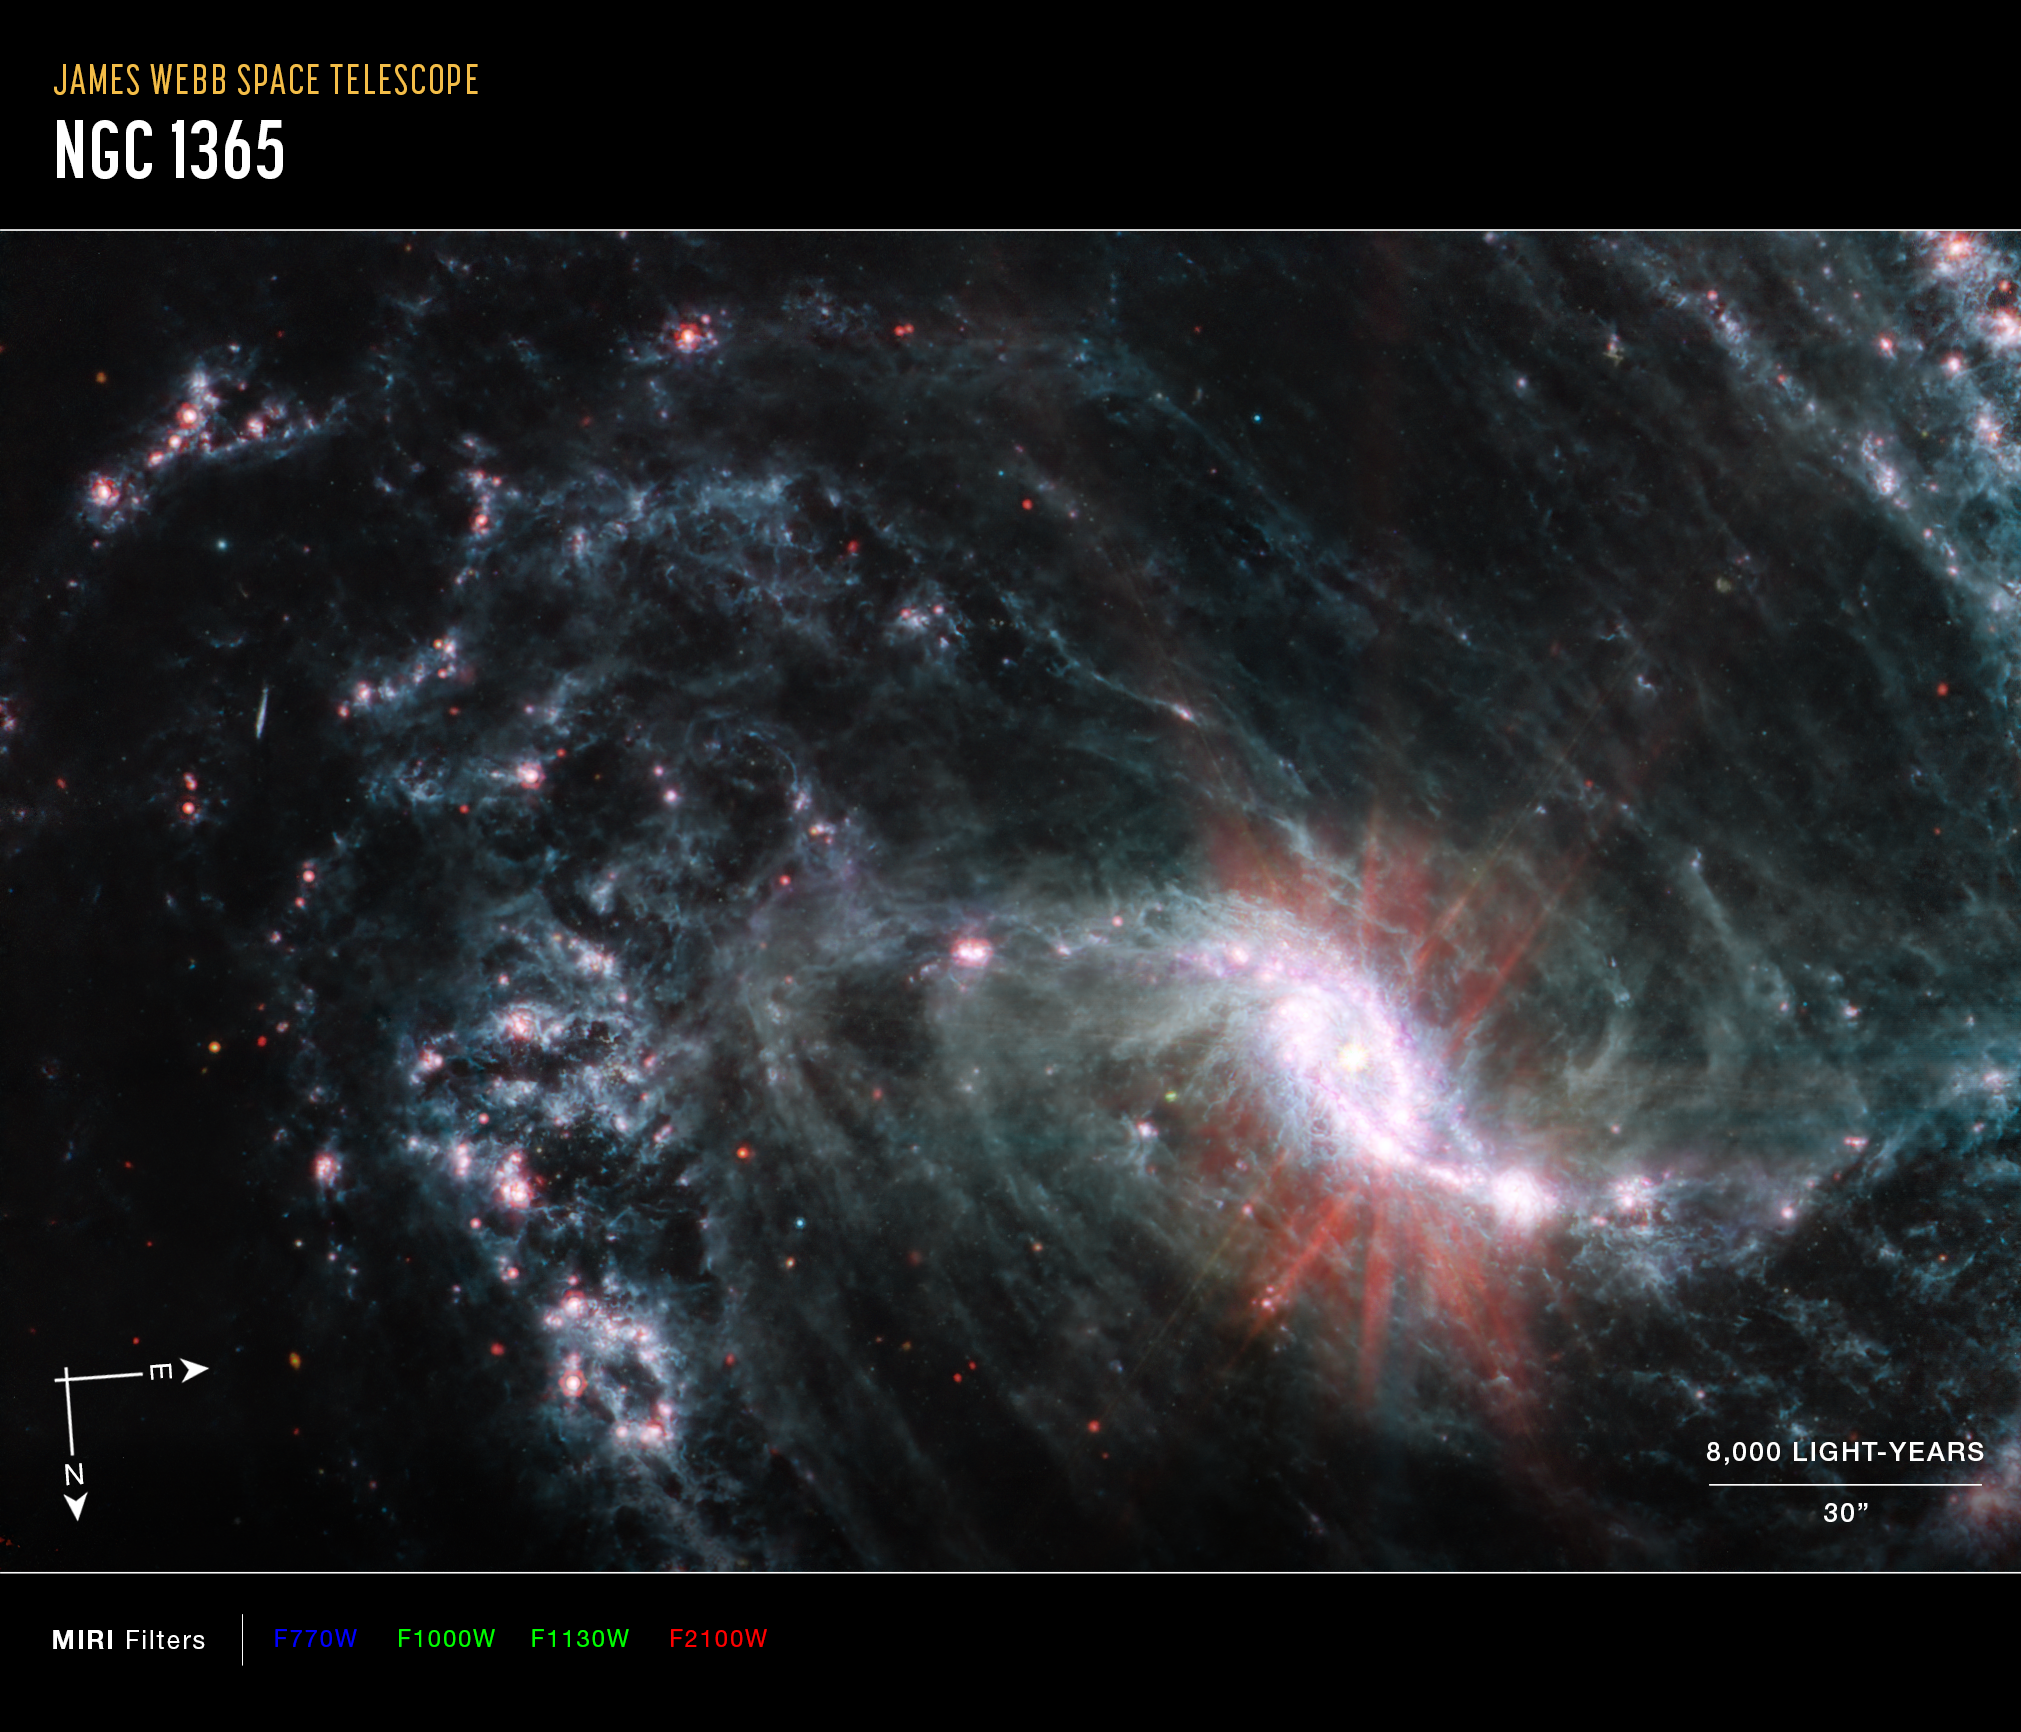

NGC 1365 (MIRI Image - Annotated)

This image of the nearby galaxy NGC 1365, captured by Webb’s Mid-Infrared Instrument (MIRI) shows compass arrows, scale bar, and color key for reference.

The north and east compass arrows show the orientation of the image on the sky. Note that the relationship between north and east on the sky (as seen from below) is flipped relative to direction arrows on a map of the ground (as seen from above). At the lower right is a scale bar labeled 8,000 light-years, 30 arcseconds. The length of the scale bar is approximately one-fifth the total width of the image. Below the image is a color key showing which MIRI filters were used to create the image and which visible-light color is assigned to each filter. In this image of NGC 1365, blue, green, and red were assigned to Webb’s MIRI data at 7.7, 10 and 11.3, and 21 microns (the F770W, F1000W and F1130W, and F2100W filters, respectively).

Scientists are getting their first look with the NASA/ESA/CSA James Webb Space Telescope’s powerful resolution at how the formation of young stars influences the evolution of nearby galaxies. NGC 1365, observed here by Webb’s Mid-Infrared Instrument (MIRI) is one of a total of 19 galaxies targeted for study by the Physics at High Angular resolution in Nearby Galaxies (PHANGS) collaboration.

As revealed by the MIRI observations of NGC 1365, clumps of dust and gas in the interstellar medium have absorbed the light from forming stars and emitted it back out in the infrared, lighting up an intricate network of cavernous bubbles and filamentary shells influenced by young stars releasing energy into the galaxy’s spiral arms.

Webb’s exquisite resolution also picks up several extremely bright star clusters not far from the core and newly observed recently formed clusters along the outer edges of the spiral arms.

Additionally, the Webb images provide insights into how the orbits of stars and gas vary depending on where they form, and how this results in the population of older clusters outside the inner ring of star formation.

NGC 1365 is a double-barred spiral galaxy that lies about 56 million light-years away from Earth. It’s one of the largest galaxies currently known to astronomers, spanning twice the length of the Milky Way.

MIRI was contributed by ESA and NASA, with the instrument designed and built by a consortium of nationally funded European Institutes (The MIRI European Consortium) and NASA’s Jet Propulsion Laboratory, in partnership with the University of Arizona.

Credit: NASA, ESA, CSA, and J. Lee (NOIRLab), A. Pagan (STScI)